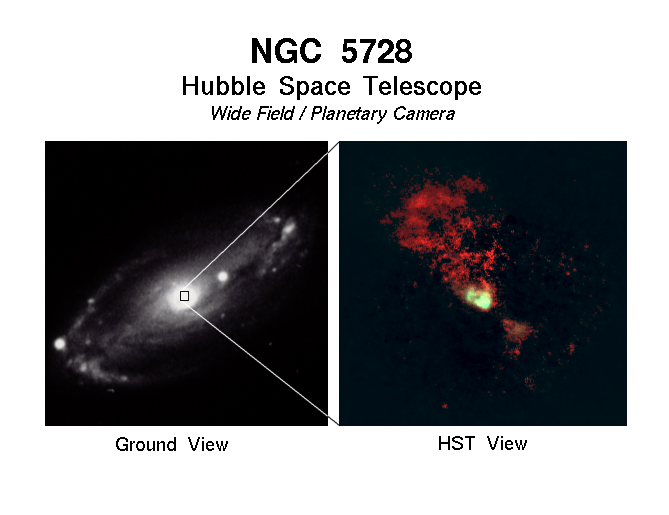

NGC 5728

Ground-based and Hubble Space Telescope view of the galaxy NGC 5728.

Credit: Andrew S. Wilson (STScI)/NASA/ESA, James A. Braatz (Univ. Of Maryland), Timothy M. Heckman (STScI), Julian H. Krolik (JHU), George K. Miley (Leiden Observatory), and Allan Sandage (Carnegie Observatories)